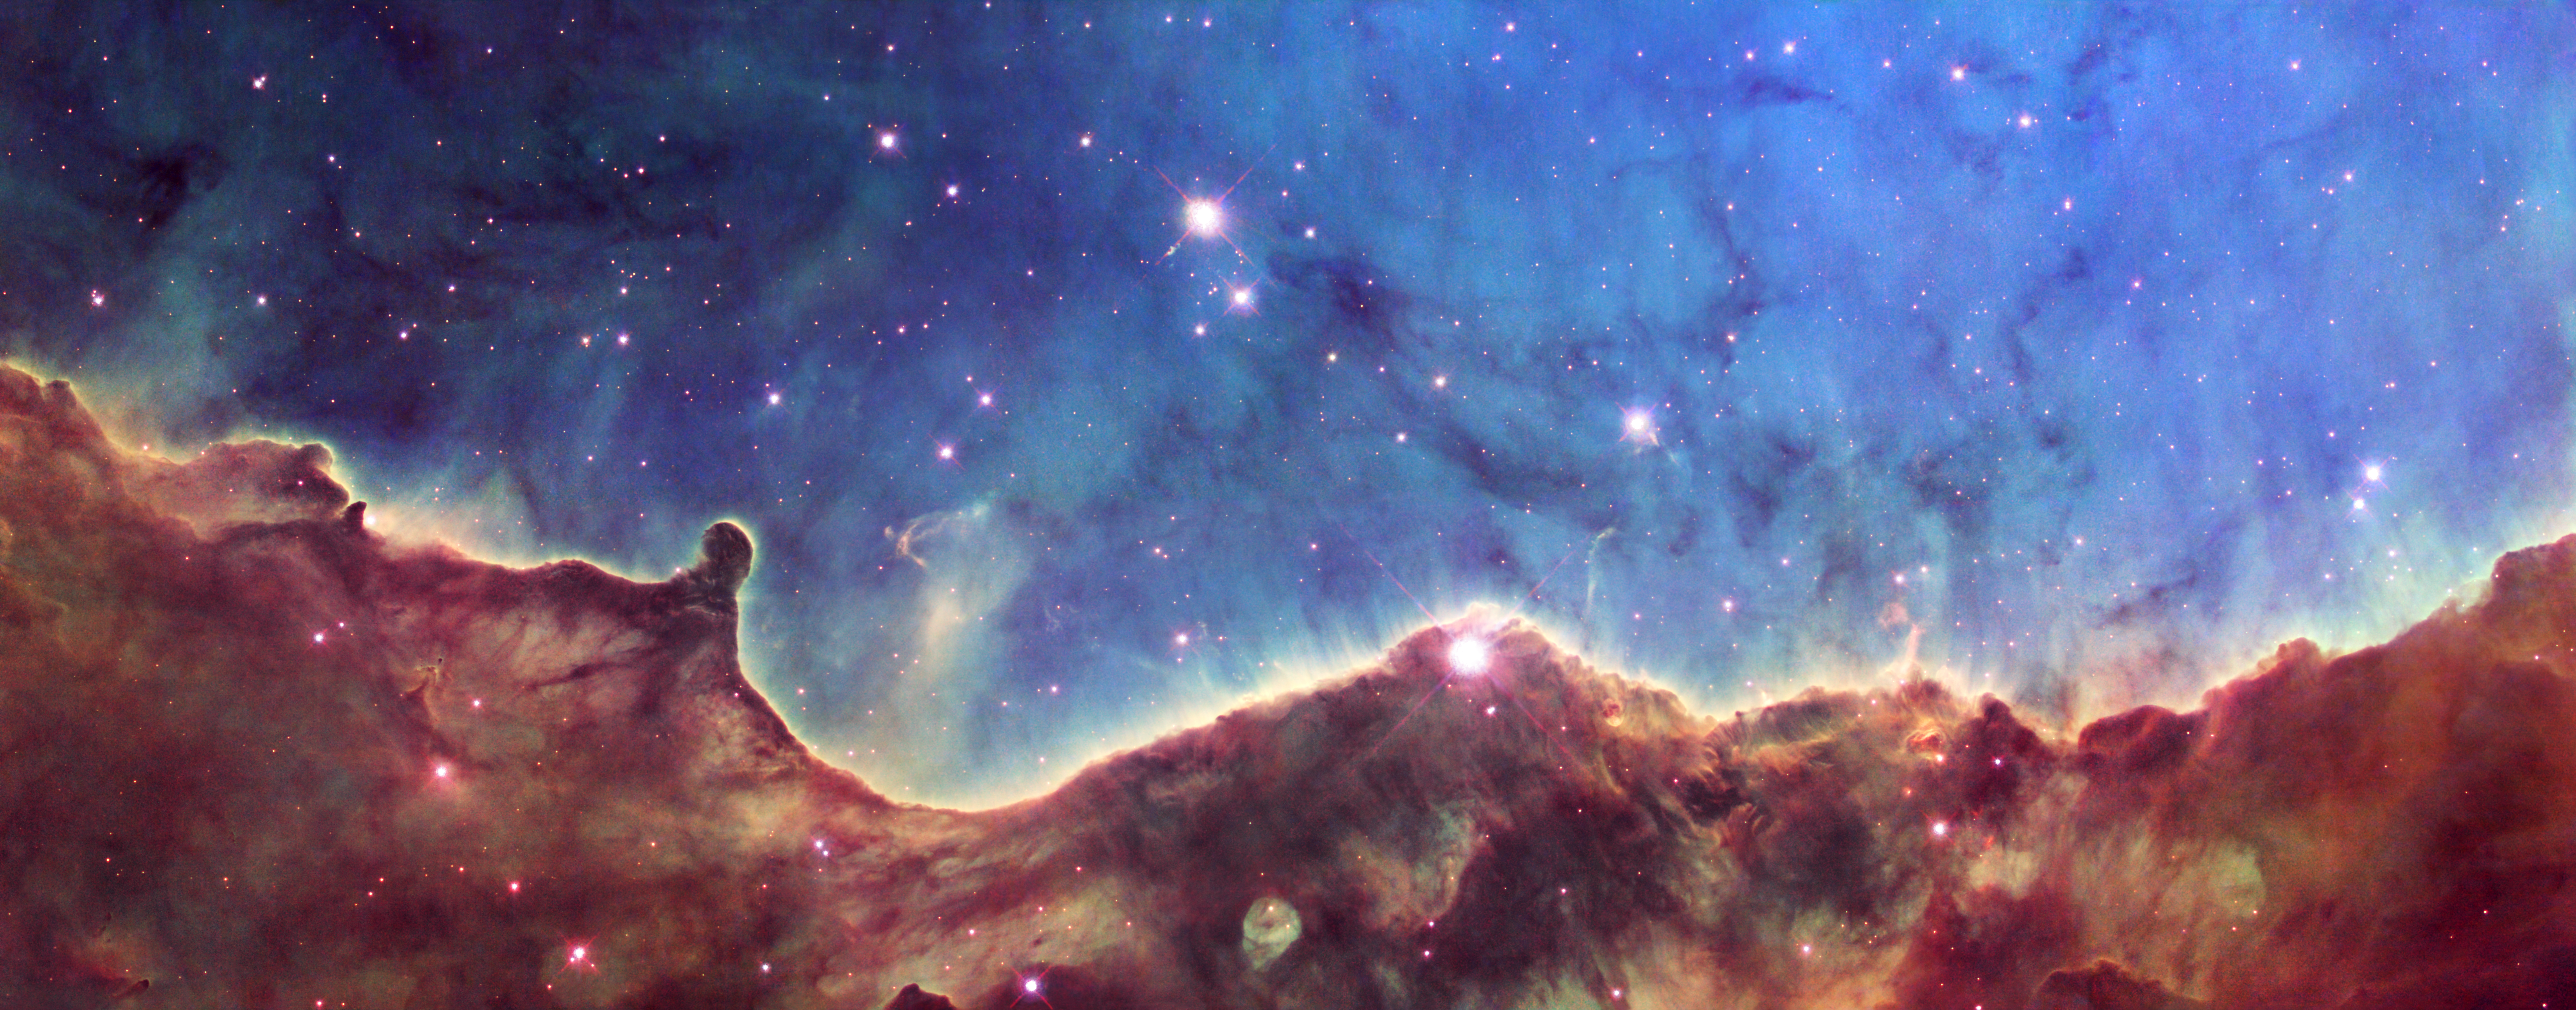

Hubble image of NGC 3324

Located in the Southern Hemisphere, NGC 3324 is at the northwest corner of the Carina Nebula (NGC 3372), home of the Keyhole Nebula and the active, outbursting star Eta Carinae. The entire Carina Nebula complex is located at a distance of roughly 7,200 light-years, and lies in the constellation Carina.

This image is a composite of data taken with two of Hubble's science instruments. Data taken with the Advanced Camera for Surveys (ACS) in 2006 isolated light emitted by hydrogen. More recent data, taken in 2008 with the Wide Field Planetary Camera 2 (WFPC2), isolated light emitted by sulfur and oxygen gas. To create a color composite, the data from the sulfur filter are represented by red, from the oxygen filter by blue, and from the hydrogen filter by green.

Credit: NASA, ESA, and The Hubble Heritage Team (STScI/AURA)